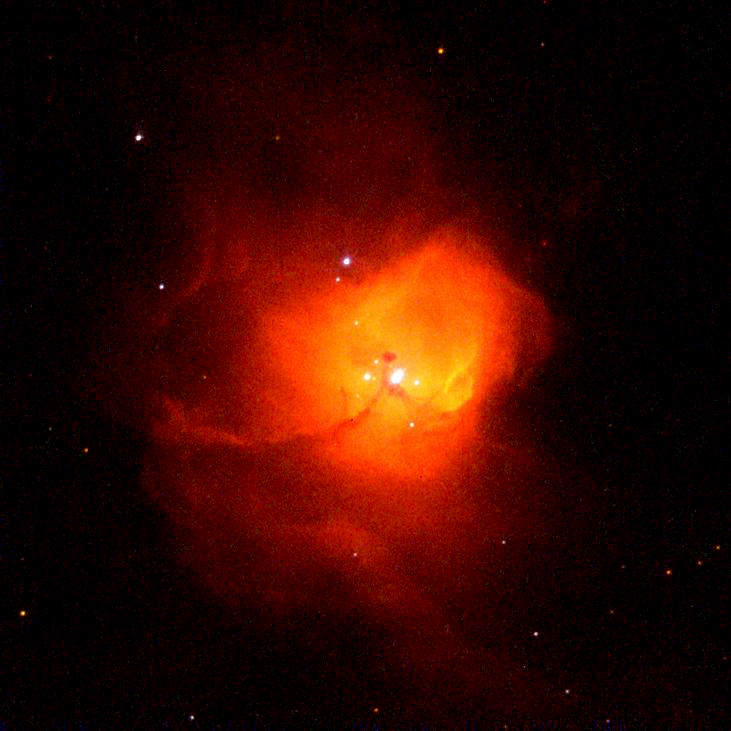

Massive starbirth in N81

A NASA/ESA Hubble Space Telescope 'family portrait' of young, ultra-bright stars nested in their embryonic cloud of glowing gases. The celestial maternity ward, called N81, is located 200, 000 light-years away in the Small Magellanic Cloud (SMC), a small irregular satellite galaxy of our Milky Way.

Credit: Mohammad Heydari-Malayeri (Paris Observatory, France), NASA/ESA